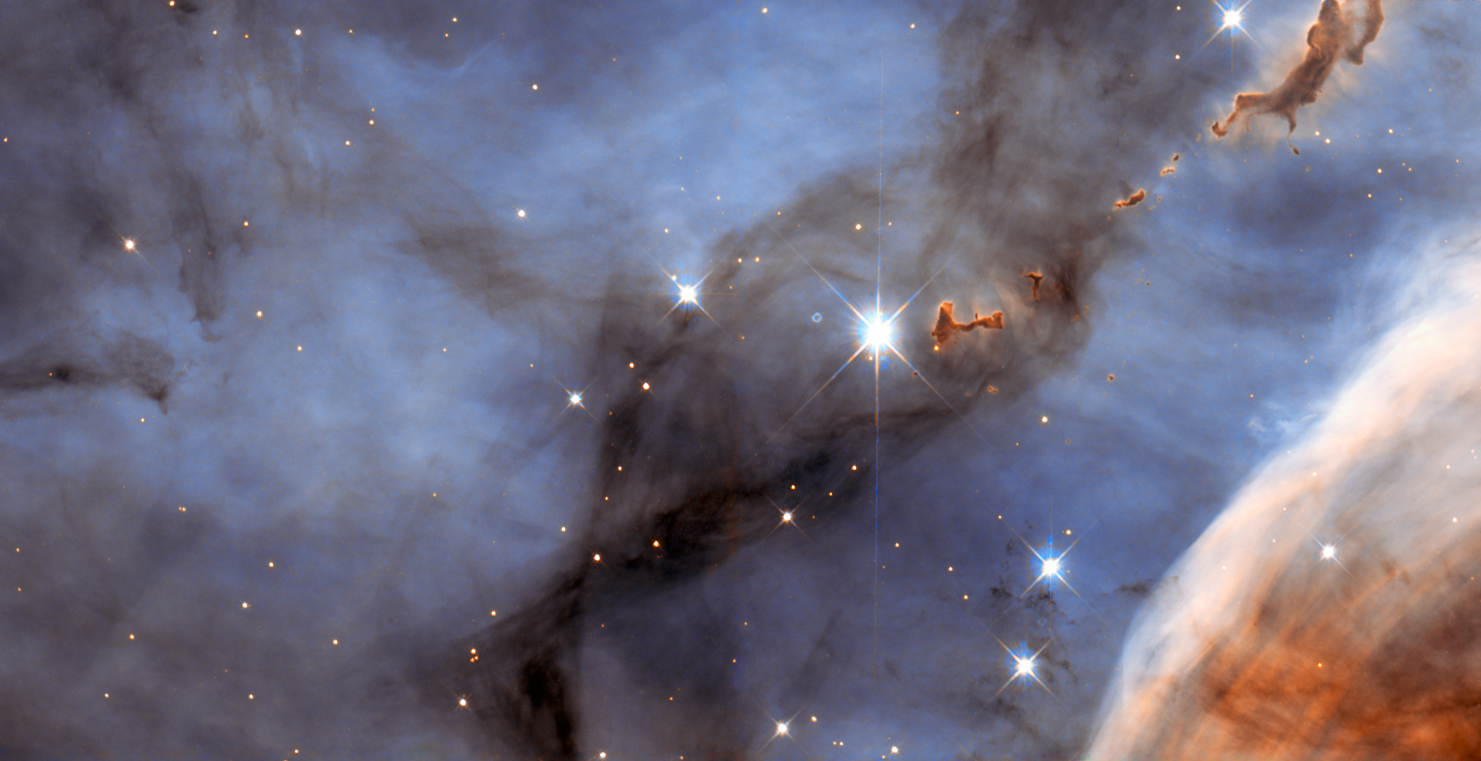

Return to the Carina Nebula

Looking like an elegant abstract art piece painted by talented hands, this picture is actually a NASA/ESA Hubble Space Telescope image of a small section of the Carina Nebula. Part of this huge nebula was documented in the well-known Mystic Mountain picture (heic1007a) and this picture takes an even closer look at another piece of this bizarre astronomical landscape (heic0707a).

The Carina Nebula itself is a star-forming region about 7500 light-years from Earth in the southern constellation of Carina (The Keel: part of Jason’s ship the Argo). Infant stars blaze with a ferocity so severe that the radiation emitted carves away at the surrounding gas, sculpting it into strange structures. The dust clumps towards the upper right of the image, looking like ink dropped into milk, were formed in this way. It has been suggested that they are cocoons for newly forming stars.

The Carina Nebula is mostly made from hydrogen, but there are other elements present, such as oxygen and sulphur. This provides evidence that the nebula is at least partly formed from the remnants of earlier generations of stars where most elements heavier than helium were synthesised.

The brightest stars in the image are not actually part of the Carina Nebula. They are much closer to us, essentially being the foreground to the Carina Nebula’s background.

This picture was created from images taken with Hubble’s Wide Field Planetary Camera 2. Images through a blue filter (F450W) were coloured blue and images through a yellow/orange filter (F606W) were coloured red. The field of view is 2.4 by 1.3 arcminutes.

Credit: ESA/Hubble & NASA